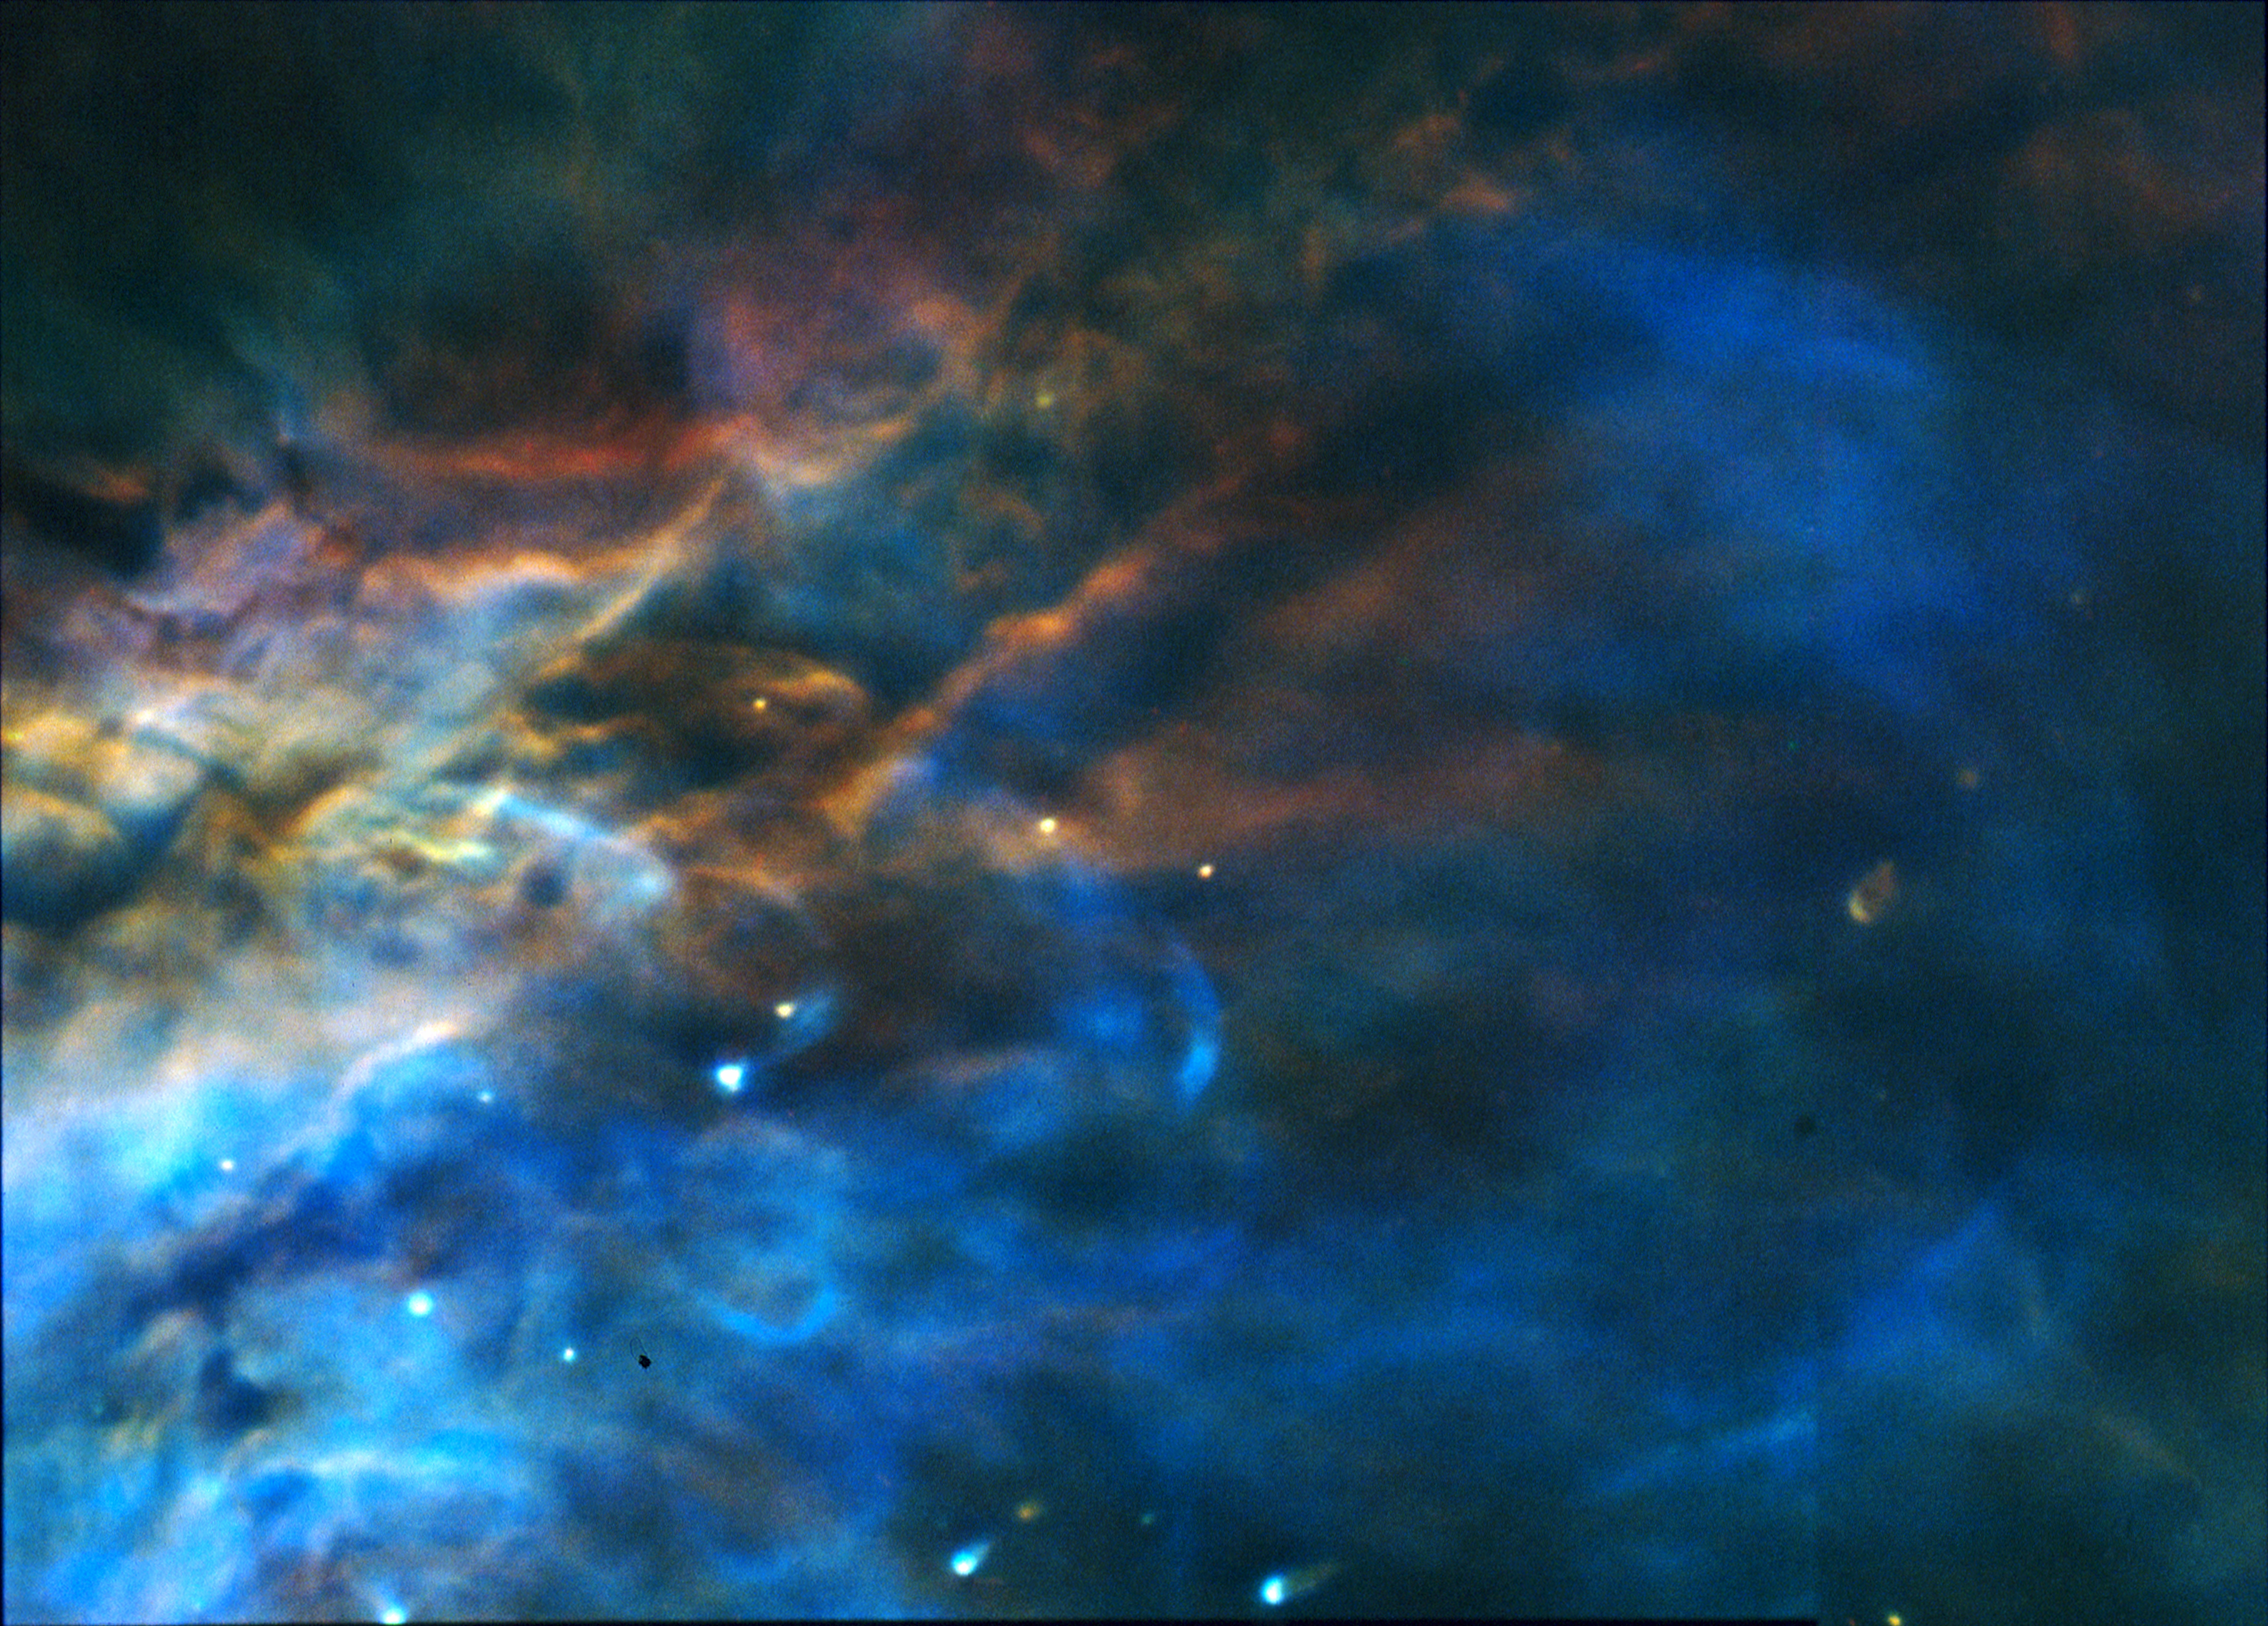

The Stunning Colors of the Orion Nebula

A NASA Hubble Space Telescope "true color" mosaic image of a small portion of the Orion Nebula, taken the Wide Field and Planetary Camera.

This color photograph is a composite of separate images taken at the wavelengths of three abundant elements in the nebula: Hydrogen, Oxygen and Nitrogen. The images were taken August 13 and 14, 1991.

Credit: C.R. O'Dell (Rice University), and NASA